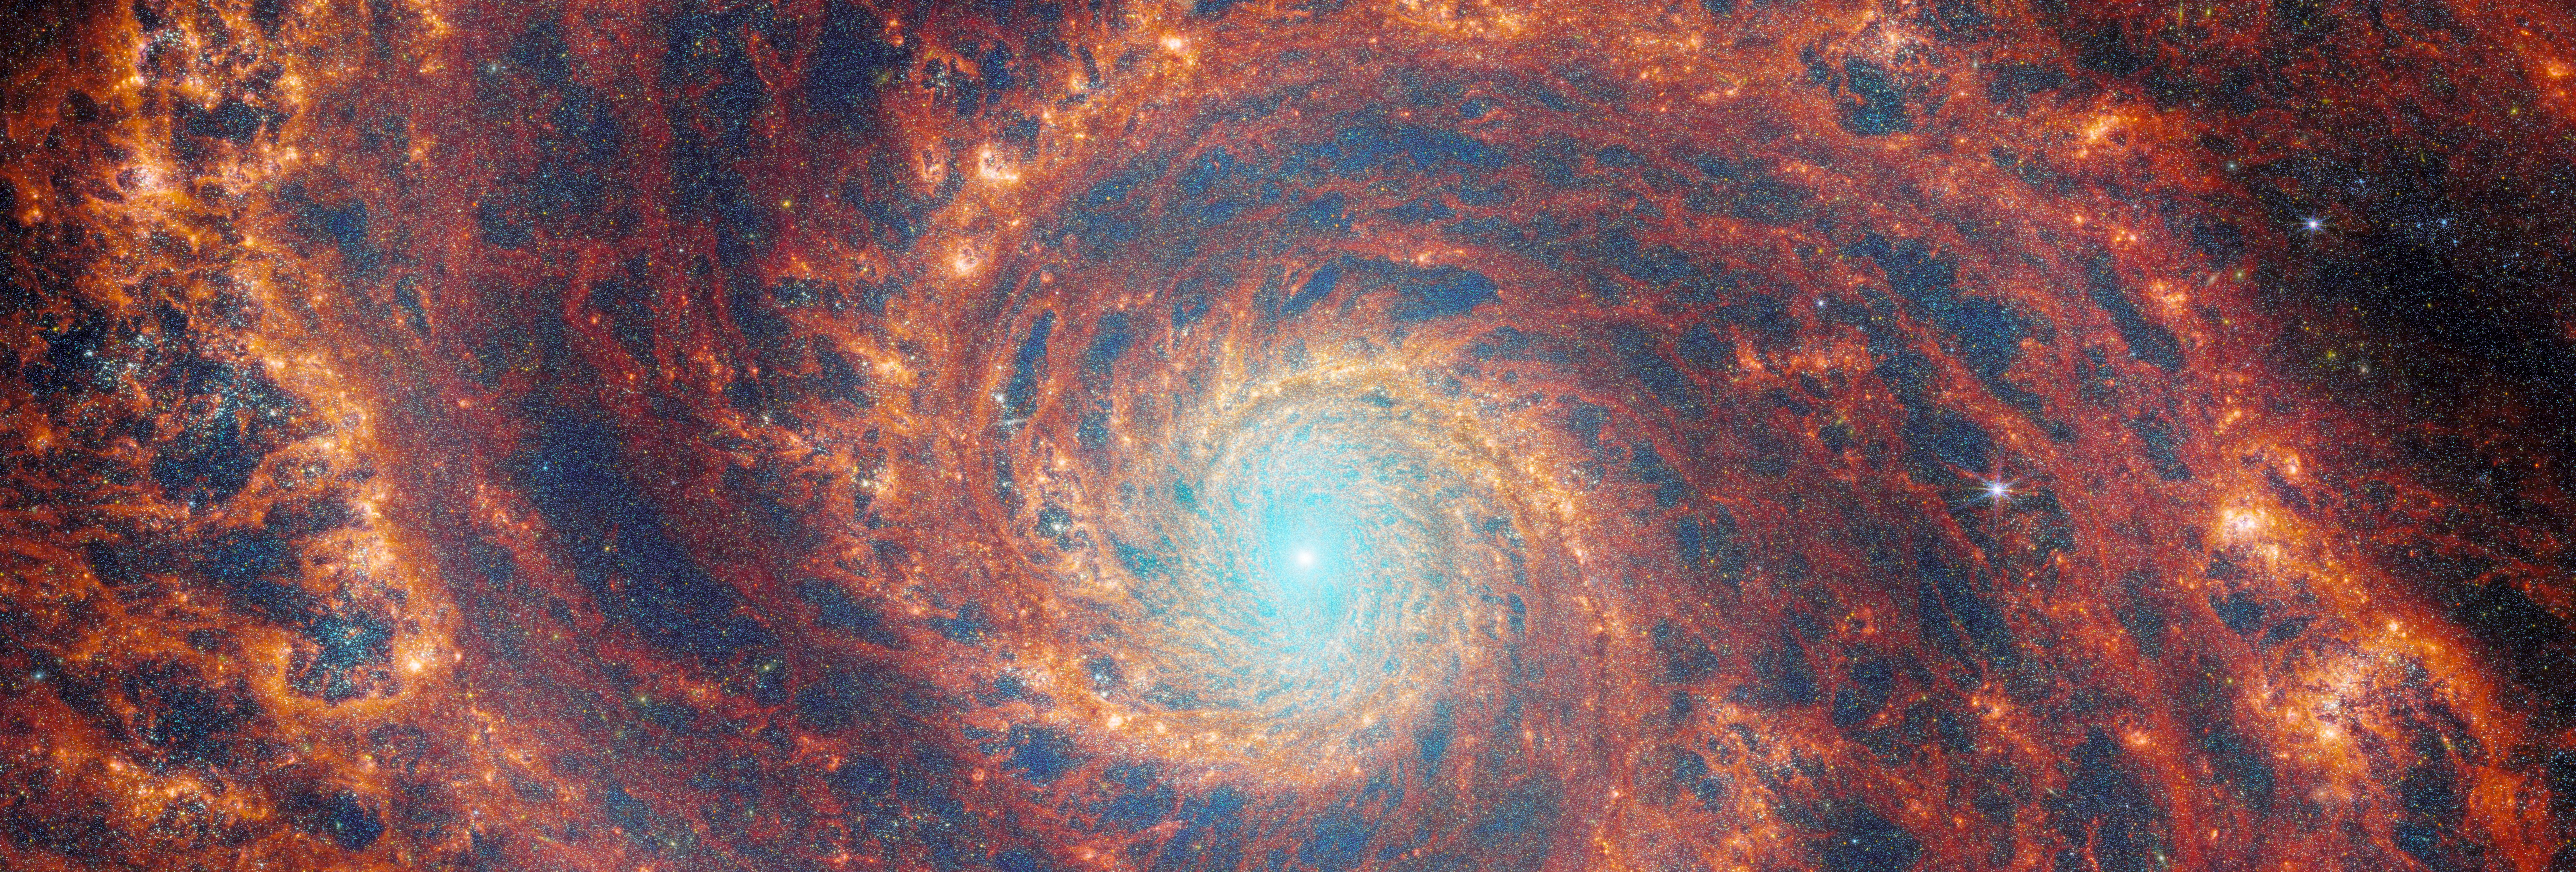

A FEAST for the eyes

The graceful winding arms of the grand-design spiral galaxy M51 stretch across this image from the NASA/ESA/CSA James Webb Space Telescope. Unlike the menagerie of weird and wonderful spiral galaxies with ragged or disrupted spiral arms, grand-design spiral galaxies boast prominent, well-developed spiral arms like the ones showcased in this image. This galactic portrait is a composite image that integrates data from Webb’s Near-InfraRed Camera (NIRCam) and Mid-InfraRed Instrument (MIRI).

In this image the dark red regions trace the filamentary warm dust permeating the medium of the galaxy. The red regions show the reprocessed light from complex molecules forming on dust grains, while colours of orange and yellow reveal the regions of ionised gas by the recently formed star clusters. Stellar feedback has a dramatic effect on the medium of the galaxy and create complex network of bright knots as well as cavernous black bubbles.

M51 — also known as NGC 5194 — lies about 27 million light-years away from Earth in the constellation Canes Venatici, and is trapped in a tumultuous relationship with its near neighbour, the dwarf galaxy NGC 5195. The interaction between these two galaxies has made these galactic neighbours one of the better-studied galaxy pairs in the night sky. The gravitational influence of M51’s smaller companion is thought to be partially responsible for the stately nature of the galaxy’s prominent and distinct spiral arms. If you would like to learn more about this squabbling pair of galactic neighbours, you can explore earlier observations of M51 by the NASA/ESA Hubble Space Telescope here.

This Webb observation of M51 is one of a series of observations collectively titled Feedback in Emerging extrAgalactic Star clusTers, or FEAST. The FEAST observations were designed to shed light on the interplay between stellar feedback and star formation in environments outside of our own galaxy, the Milky Way. Stellar feedback is the term used to describe the outpouring of energy from stars into the environments which form them, and is a crucial process in determining the rates at which stars form. Understanding stellar feedback is vital to building accurate universal models of star formation.

The aim of the FEAST observations is to discover and study stellar nurseries in galaxies beyond our own Milky Way. Before Webb became operative, other observatories such as the Atacama Large Millimetre Array in the Chilean desert and Hubble have given us a glimpse of star formation either at the onset (tracing the dense gas and dust clouds where stars will form) or after the stars have destroyed with their energy their natal gas and dust clouds. Webb is opening a new window into the early stages of star formation and stellar light, as well as the energy reprocessing of gas and dust. Scientists are seeing star clusters emerging from their natal cloud in galaxies beyond our local group for the first time. They will also be able to measure how long it takes for these stars to pollute with newly formed metals and to clean out the gas (these time scales are different from galaxy to galaxy). By studying these processes, we will better understand how the star formation cycle and metal enrichment are regulated within galaxies as well as what are the time scales for planets and brown dwarfs to form. Once dust and gas is removed from the newly formed stars, there is no material left to form planets.

Credit: ESA/Webb, NASA & CSA, A. Adamo (Stockholm University) and the FEAST JWST team